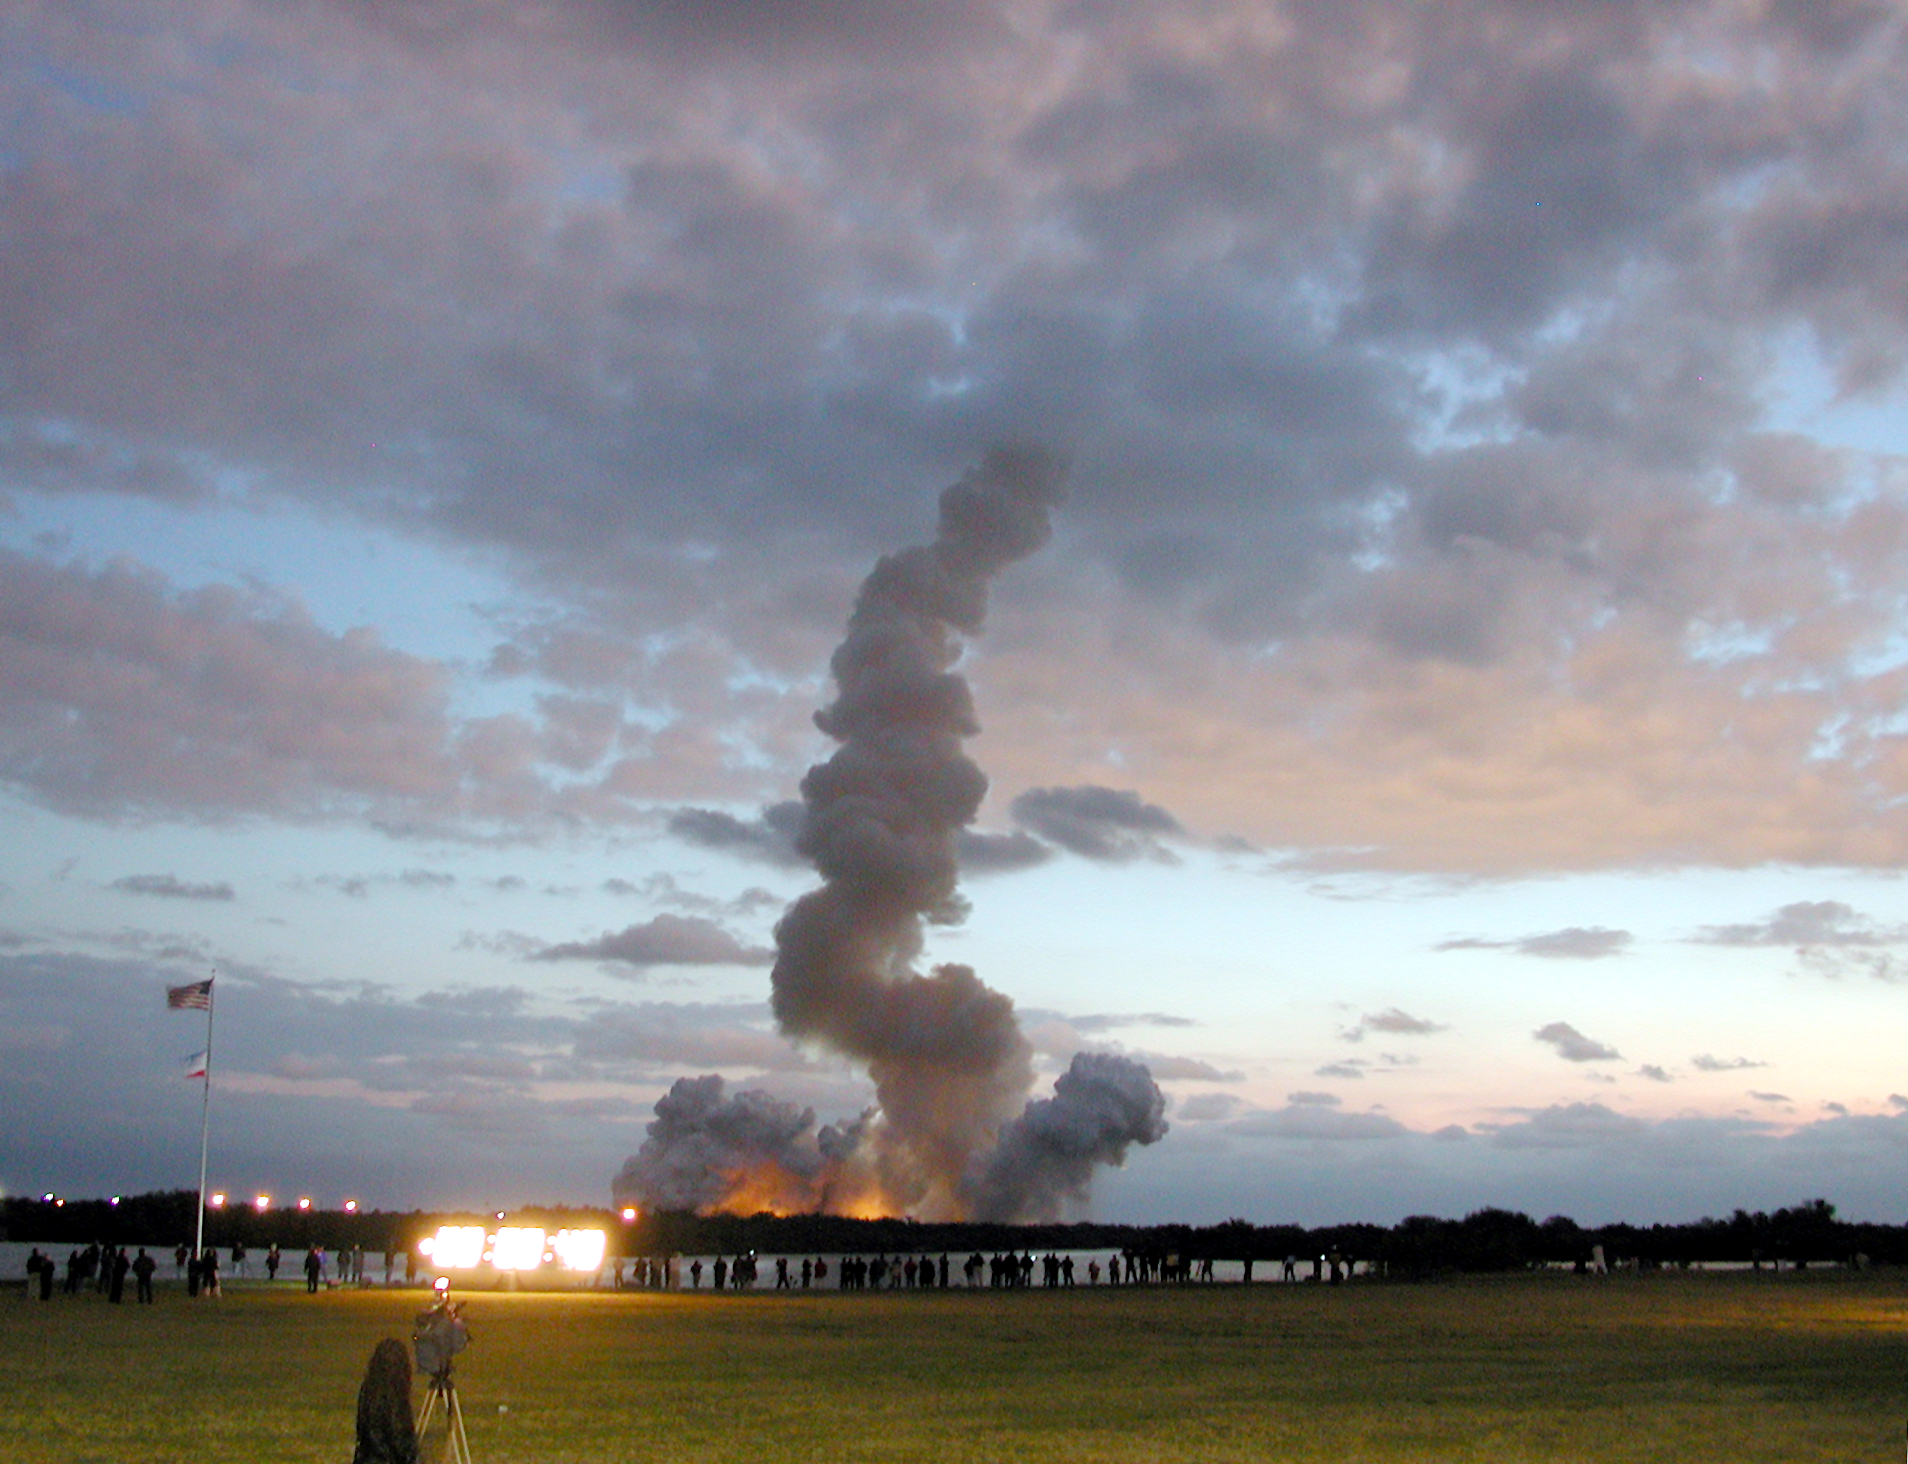

SM3B - A trail of smoke marks the path of the Space Shuttle Colombia

Colombia heads into the early morning sky on its way to the Hubble Space Telescope on 1 March 2002 for Servicing Mission 3B.

Credit: ESA 2002. Photo by Lars Lindberg Christensen